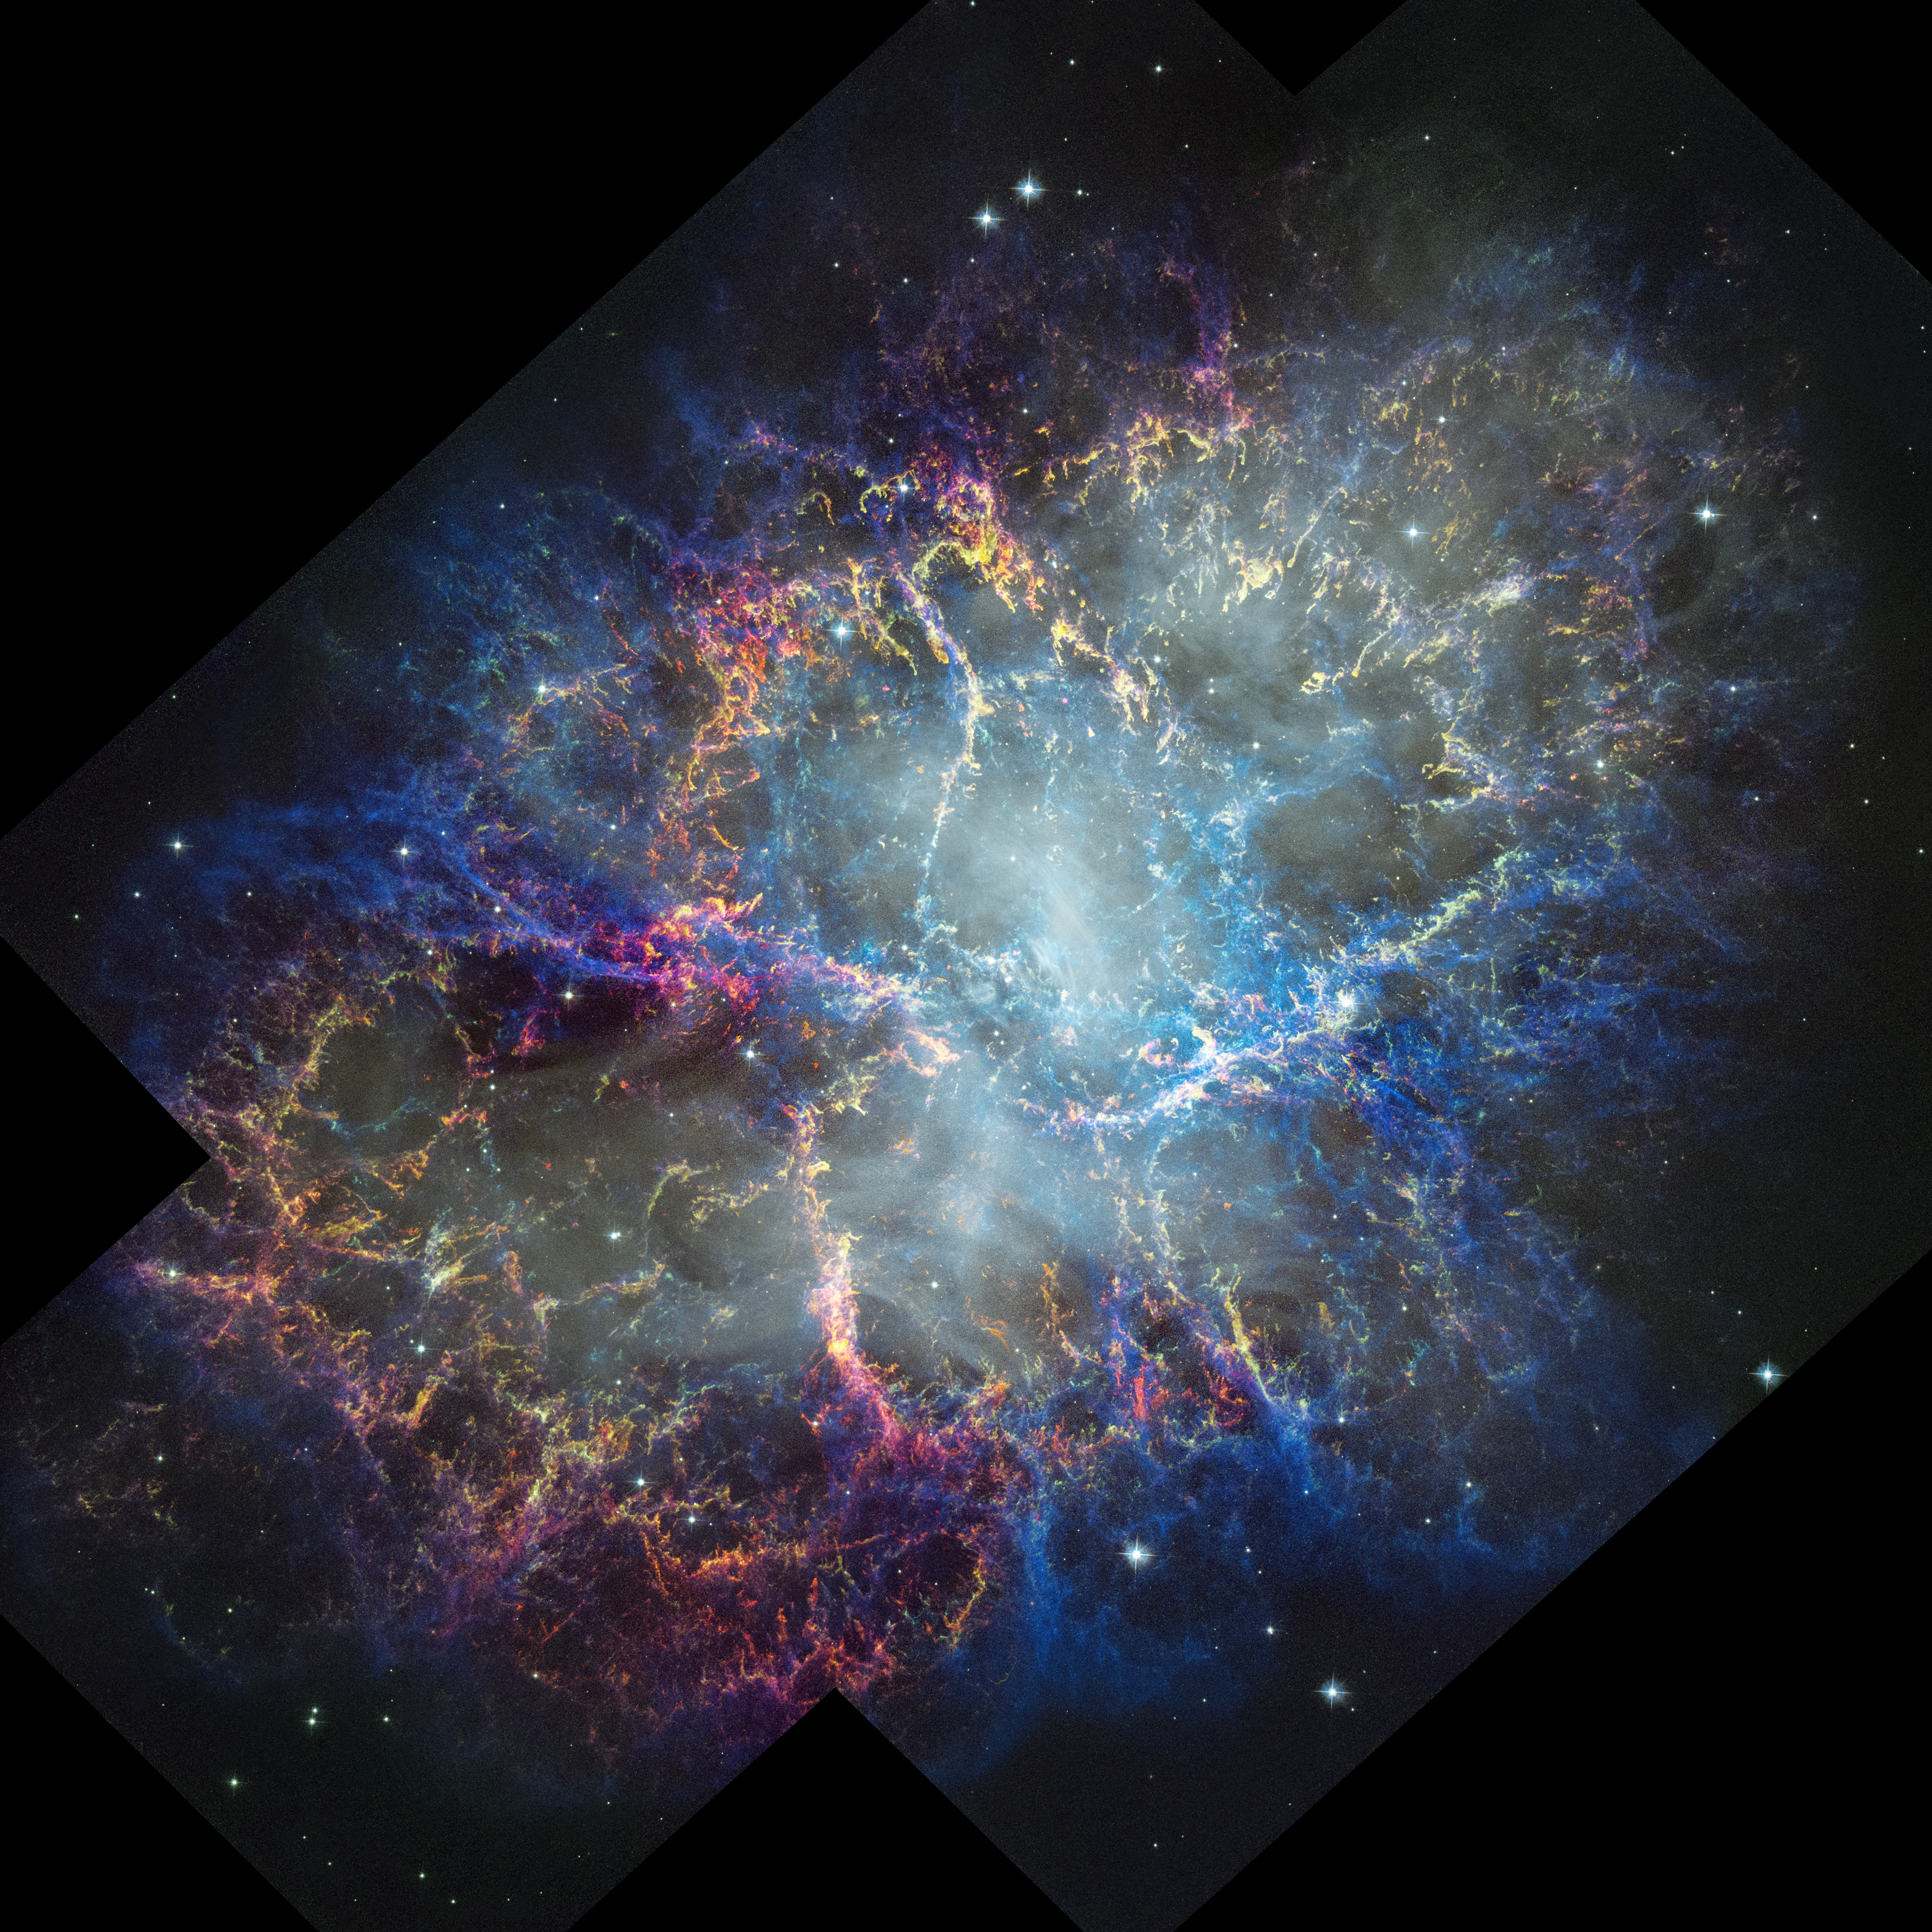

Crab Nebula (2024 Hubble image)

The NASA/ESA Hubble Space Telescope has captured the intricate detail of the Crab Nebula with its Wide Field Camera 3. The colours in the image trace Hubble’s detection of oxygen and sulfur gases in the nebula at varying densities and energies. The blue areas are the hottest and lowest density. While there is not a lot of green in the image, showing dense neutral oxygen, there is quite a lot of yellow, which appears where green and the red of energized sulfur are near to each other and similarly bright.

The white haze in the central region is synchrotron radiation, which is produced by interaction between the magnetic field of the central pulsar and the Crab’s nebulous material. This emission heats the surrounding filaments, causing them to glow. Synchrotron radiation is also powering the nebula’s ongoing expansion, distinguishing the Crab from other well-known young supernova remnants. The Crab Nebula is the closest supernova remnant of this kind to Earth, making it invaluable to astronomers using Hubble to study its evolution in unparalleled detail.

Credit: NASA, ESA, STScI, W. Blair (JHU). Image Processing: J. DePasquale (STScI)